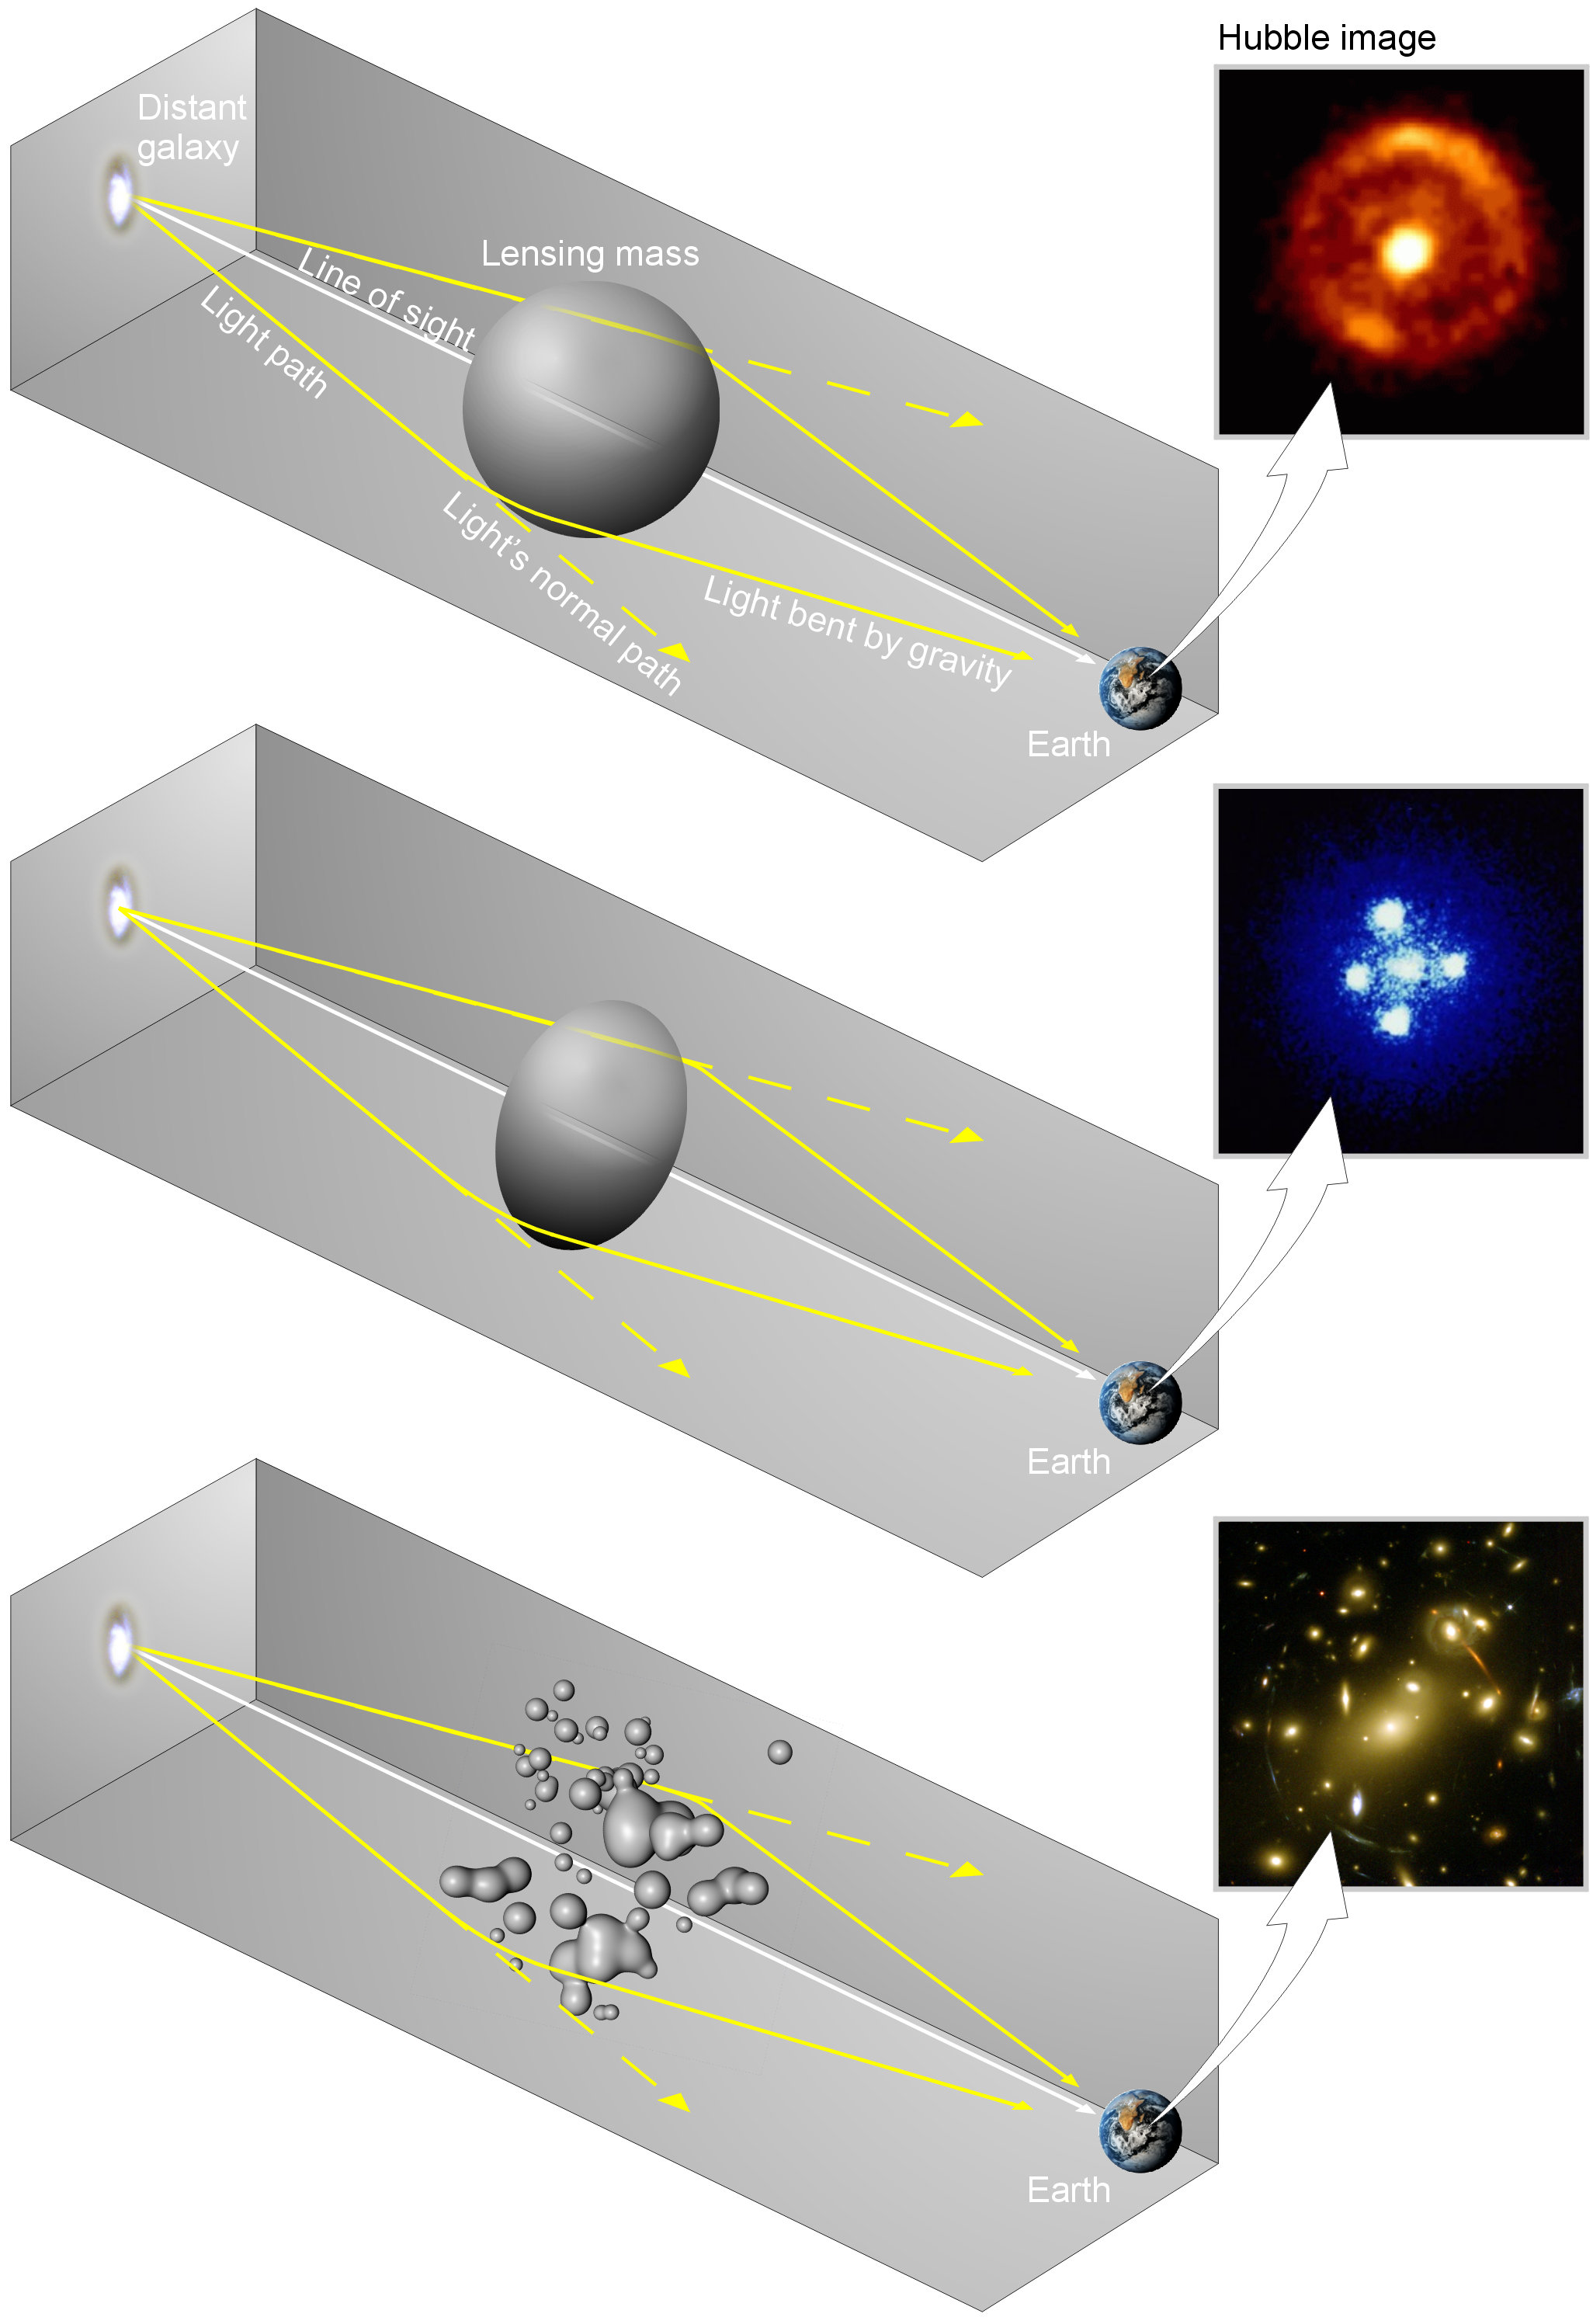

How the shape of a gravitational lens effects the lensed images

Gravitational lenses produce different shaped images depending on the shape of the lensing body. If the lens is spherical then the image appears as an Einstein ring (in other words as a ring of light) (top); if the lens is elongated then the image is an Einstein cross (it appears split into four distinct images) (middle), and if the lens is a galaxy cluster then arcs and arclets (banana-shaped images) of light are formed (bottom).

Credit: ESA 2001